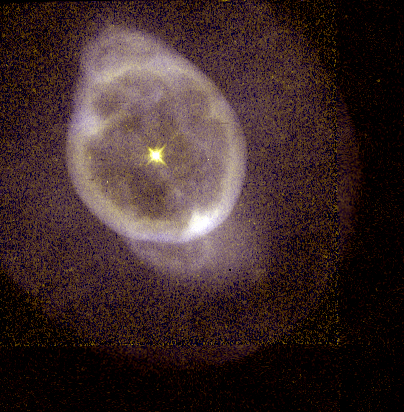

NGC 3242

This image is a part of the Hubble Gallery of Planetary Nebulae.

Credit: Howard Bond (ST ScI) and NASA/ESA